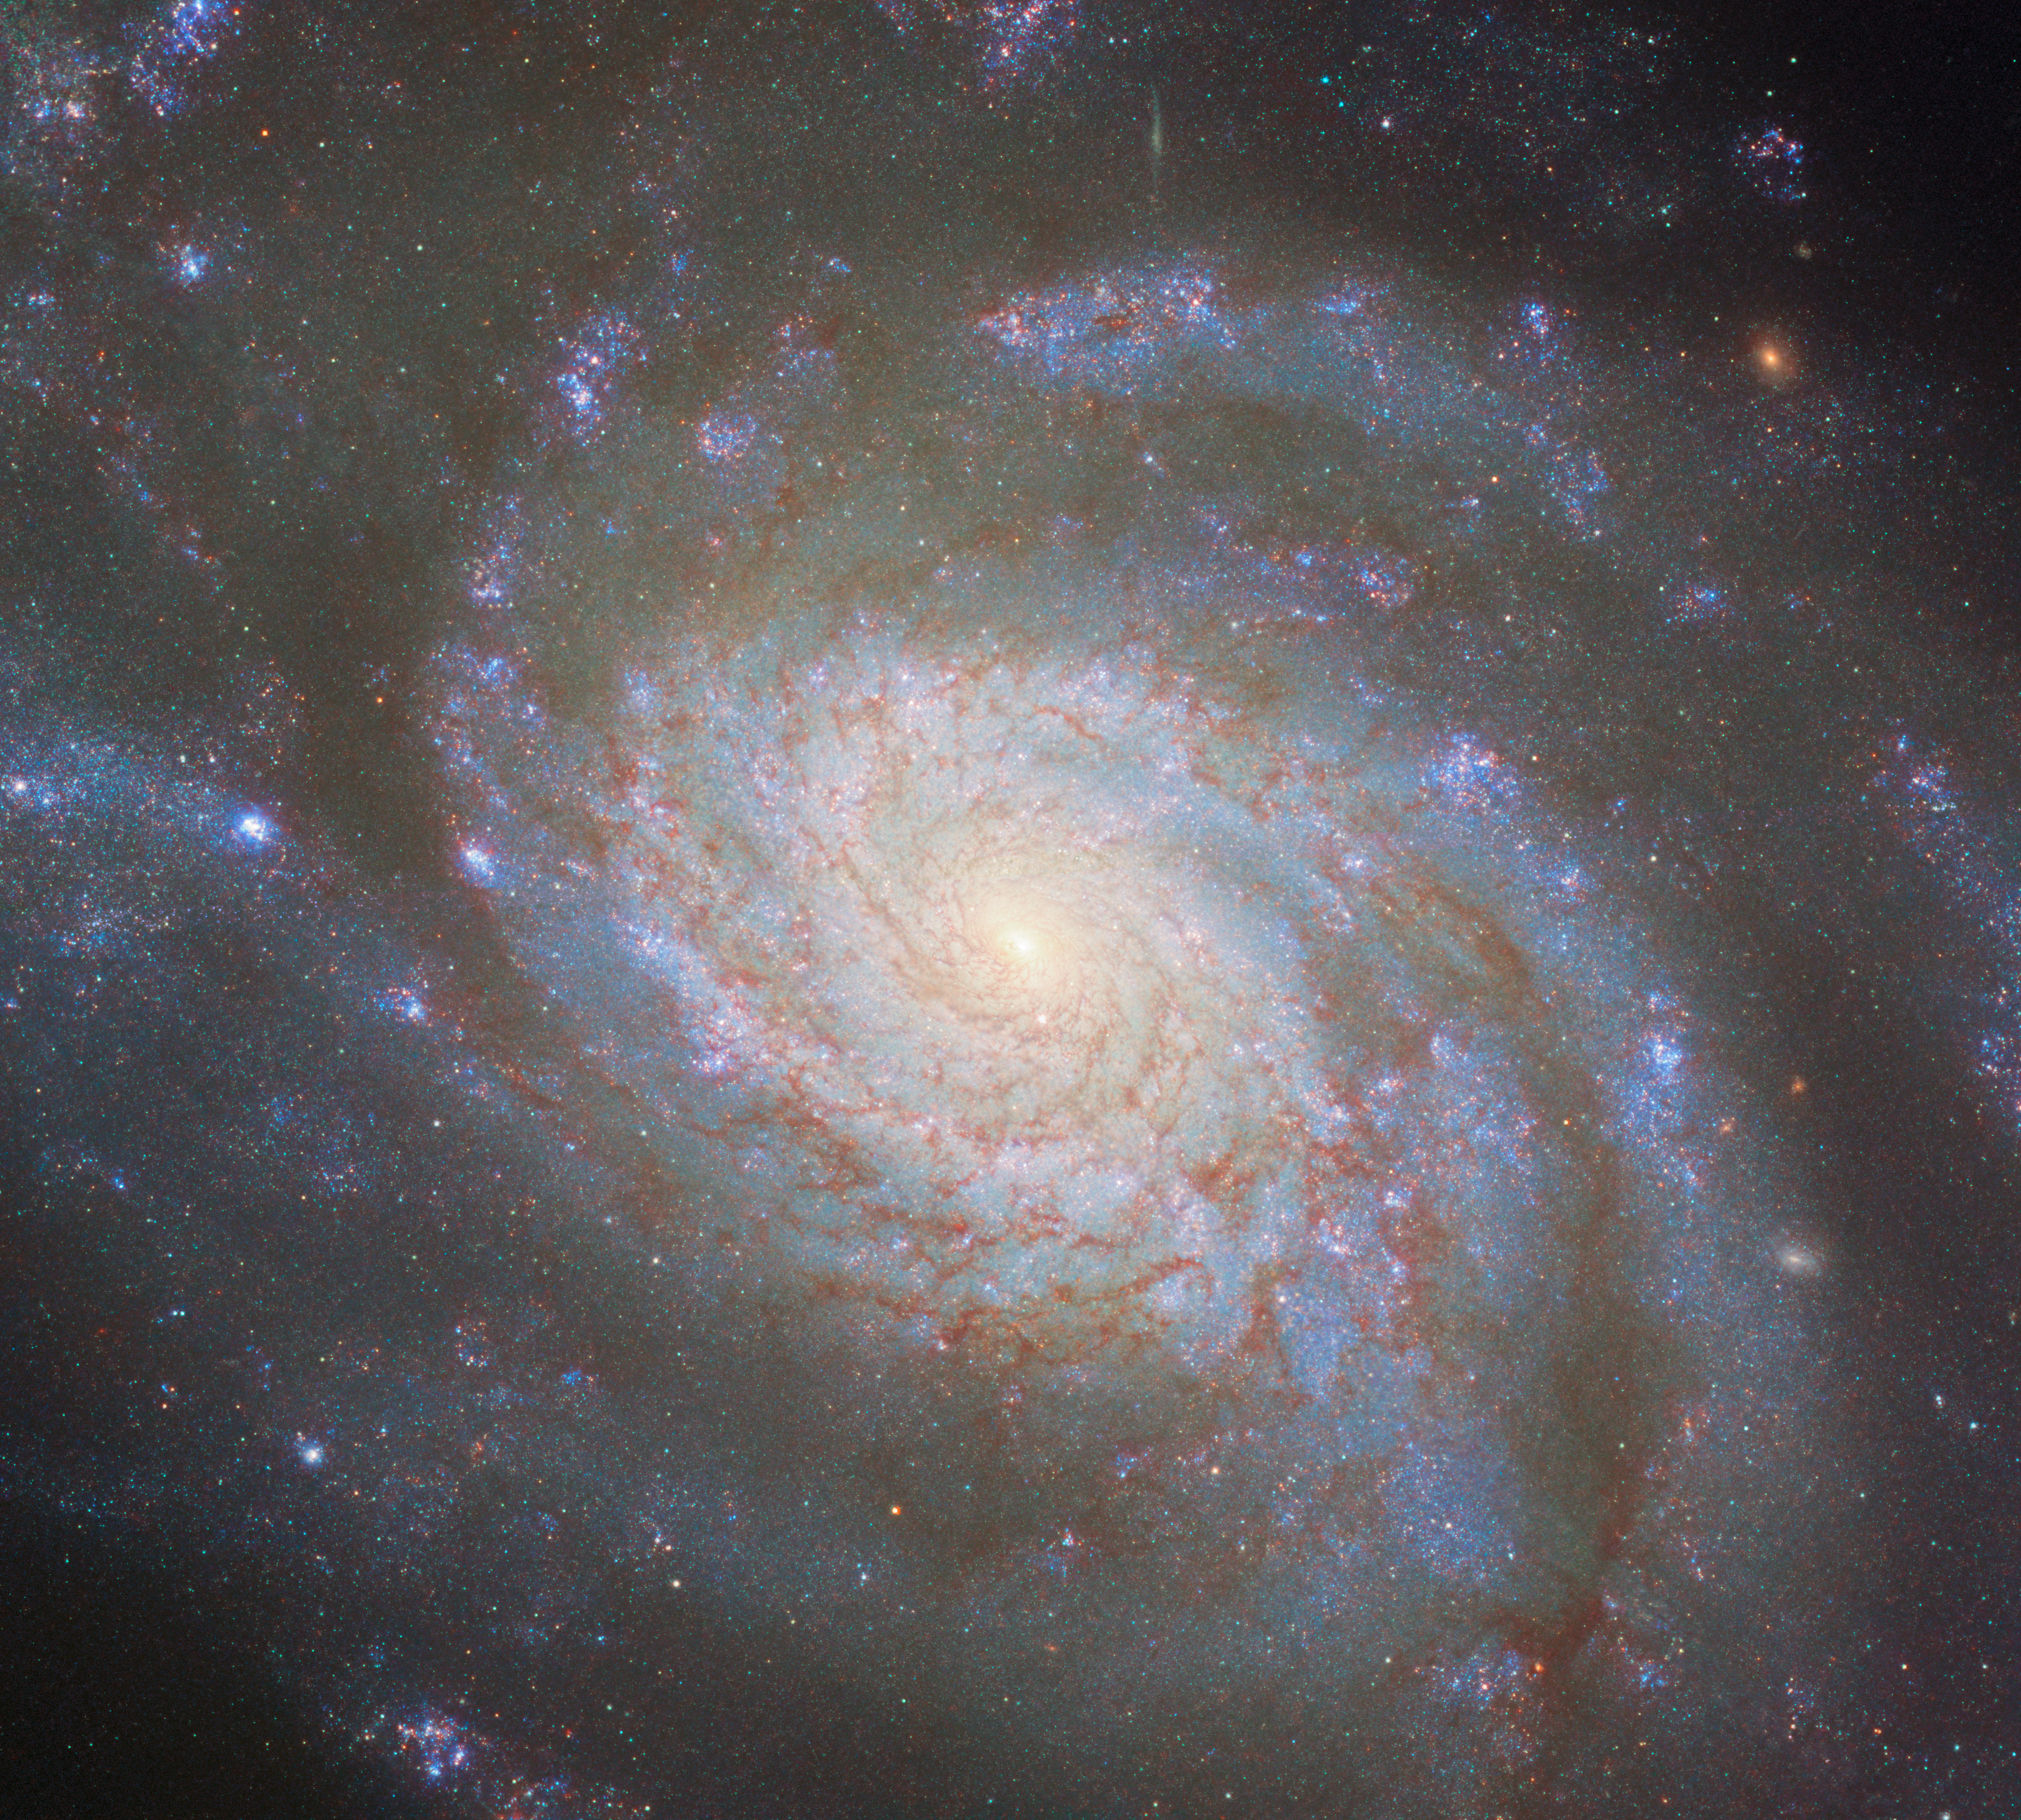

The difference between distance and dust

Measuring the distance to truly remote objects like galaxies, quasars and galaxy clusters is a crucial task in astrophysics, particularly when it comes to studying the early Universe, but it’s a difficult one. Only in the case of a few nearby objects like the Sun, planets and some nearby stars can we measure their distances directly. Beyond that, various indirect methods need to be used; one of the most important is by examining Type Ia supernovae, and this is where the NASA/ESA Hubble Space Telescope comes in.

NGC 3810, the galaxy featured in this image, was the host of a Type Ia supernova in 2022. In early 2023 Hubble focused on this and a number of other galaxies to closely examine recent Type Ia supernovae. This kind of supernova results from a white dwarf exploding, and they all have a very consistent brightness. That allows them to be used to measure distances: we know how bright a Type Ia supernova should be, so we can tell how far away it must be from how dim it appears. One uncertainty in this method is that intergalactic dust in between Earth and a supernova blocks some of its light. How do you know how much of the reduction in light is caused by distance, and how much by dust? With the help of Hubble, there’s a clever workaround: take images of the same Type Ia supernovae in ultraviolet light, which is almost completely blocked by dust, and in infrared light, which passes through dust almost unaffected. By carefully noting how much light comes through at each wavelength, the relationship between supernova brightness and distance can be calibrated to account for dust. Hubble can observe both these wavelengths of light in great detail with the same instrument. That makes it the perfect tool for this experiment, and indeed, some of the data used to make this beautiful image of NGC 3810 were focused on its 2022 supernova. You can see it as a point of light just below the galactic nucleus, or in the annotated image here.

There are many ways to measure cosmic distances; because Type Ia supernovae are so bright, they are one of the most useful and accurate tools, when they’re spotted. Many other methods must be used as well, either as an independent check against other distance measurements or to measure at much closer or farther distances. One such method that also works for galaxies is comparing their rotation speed to their brightness; based on that method, NGC 3810 is found to be 50 million light-years from Earth.

Credit: ESA/Hubble & NASA, D. Sand, R. J. Foley